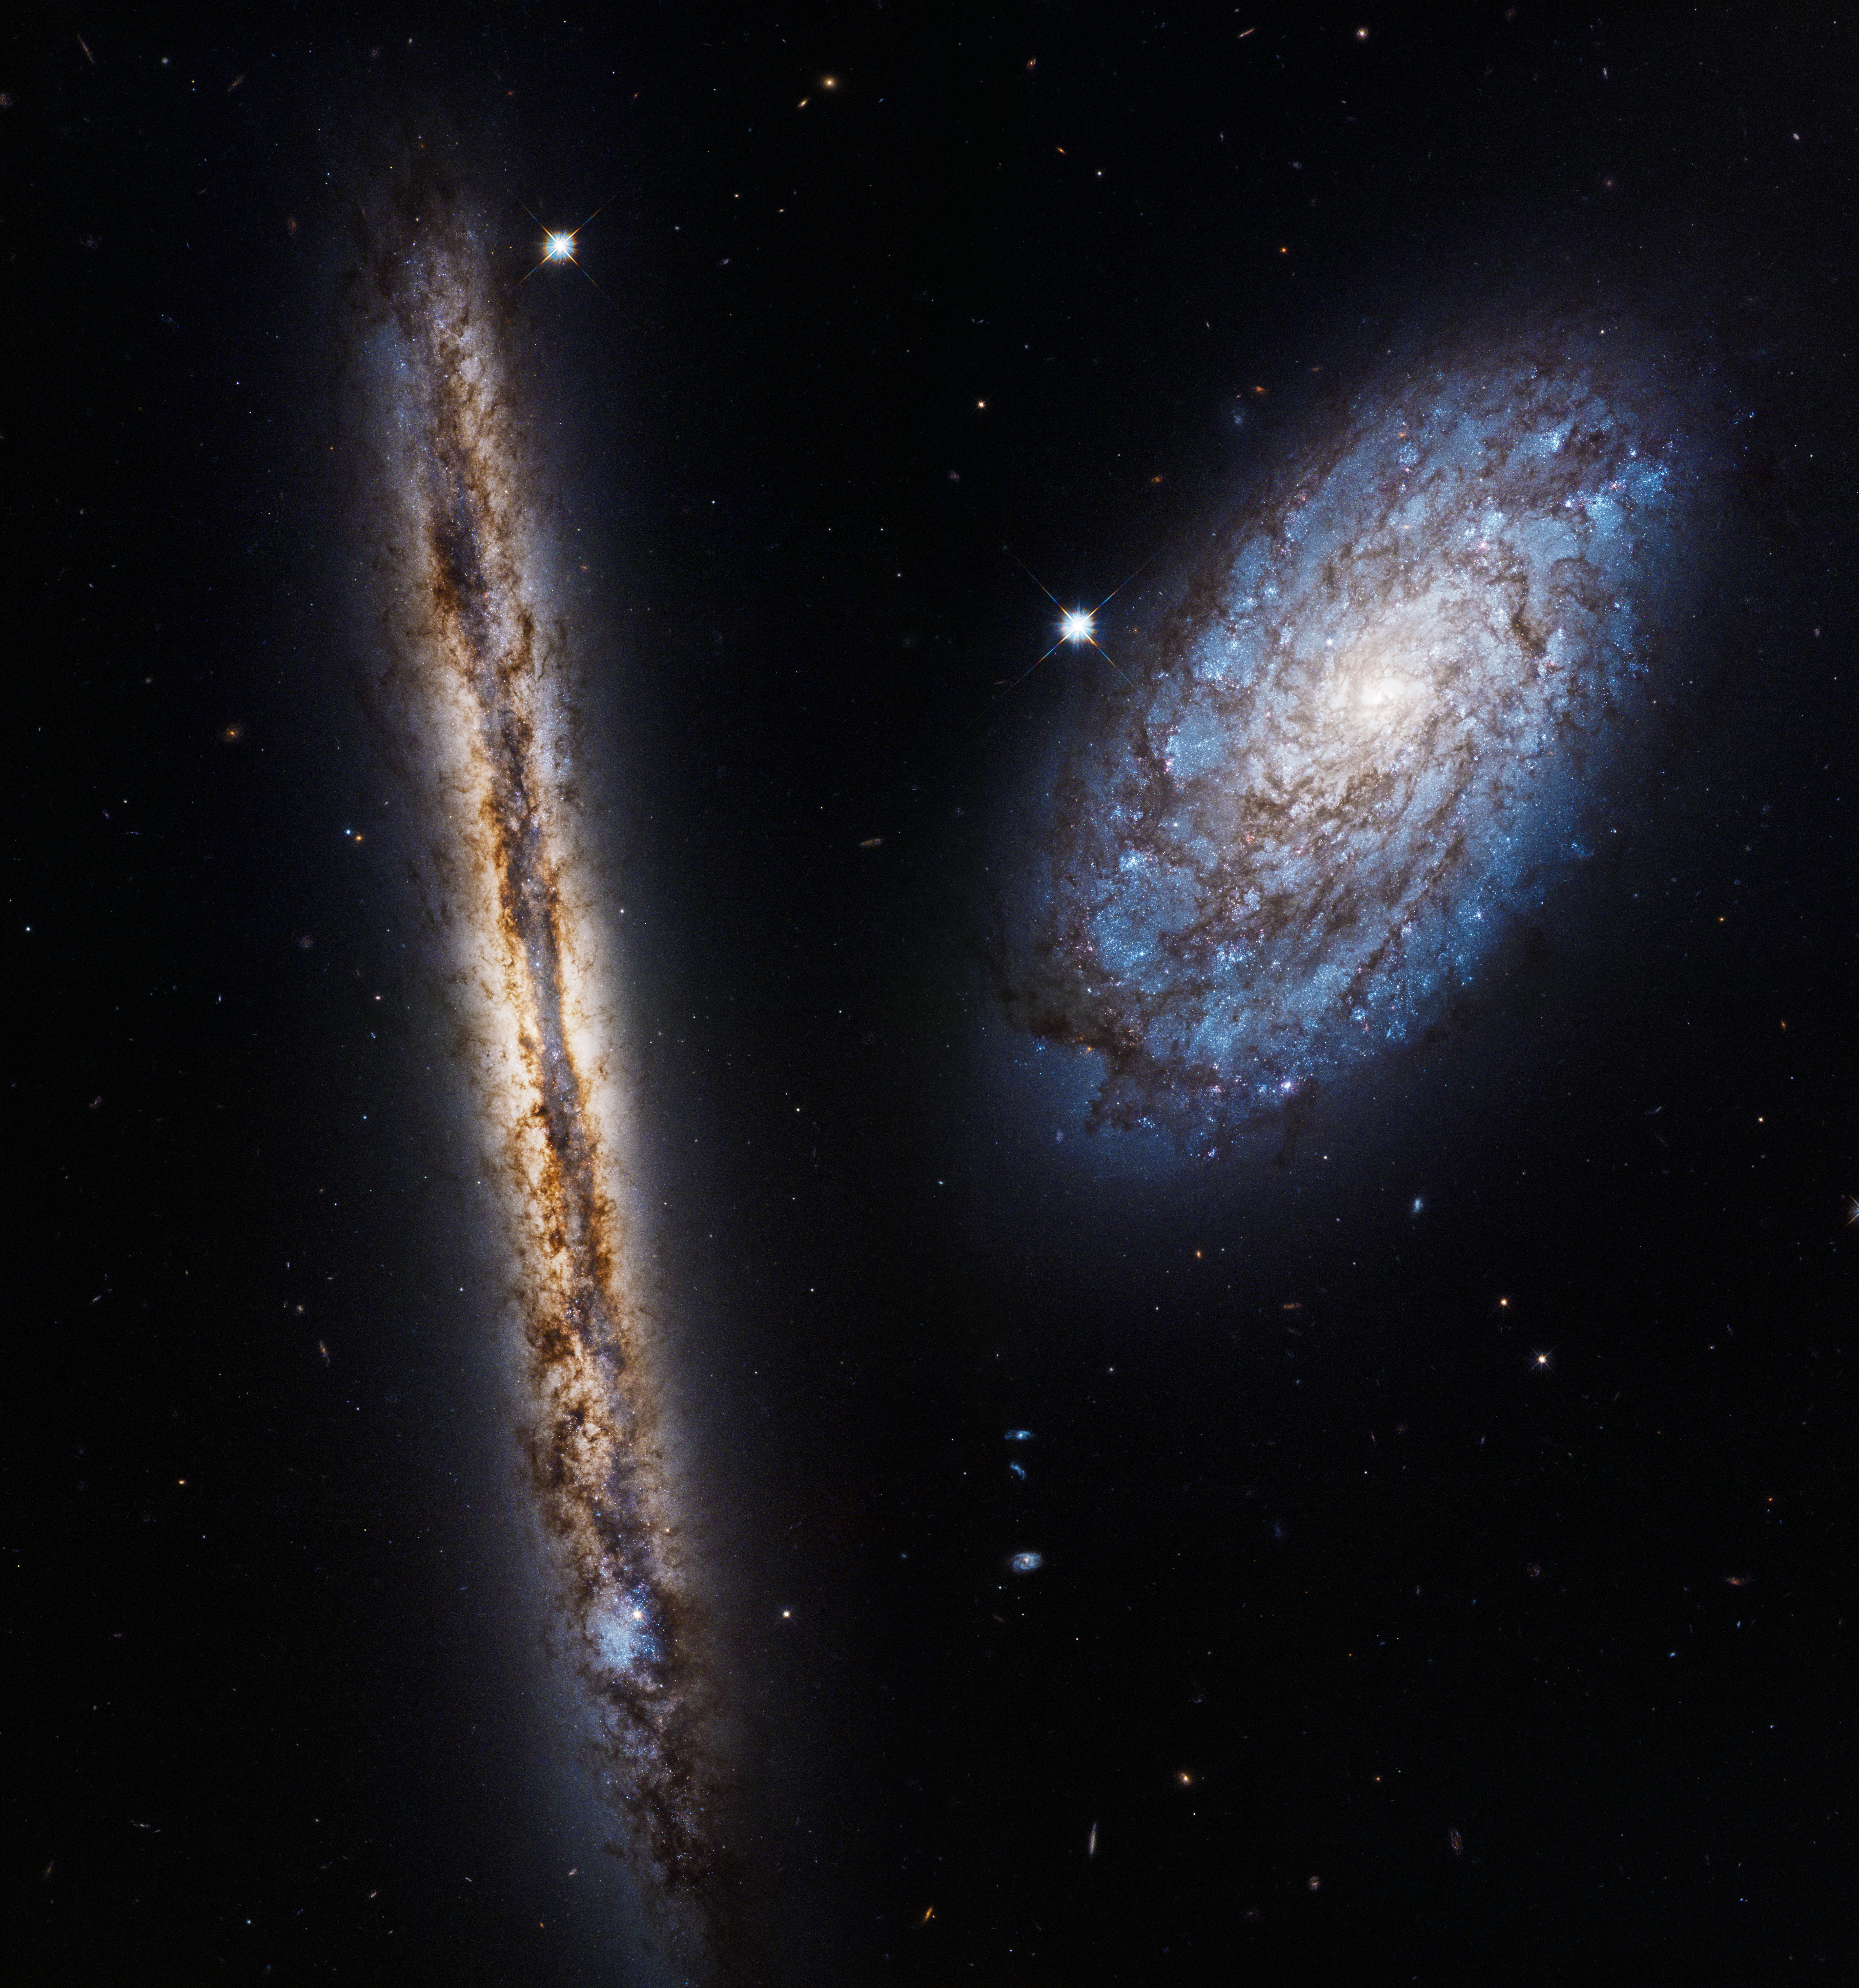

A close galactic pair

This image displays the galaxies NGC 4302 — seen edge-on — and NGC 4298, both located 55 million light-years away. They were observed by Hubble to celebrate its 27th year in orbit.

The galaxy NGC 4298 is seen almost face-on, allowing us to see its spiral arms and the blue patches of ongoing star formation and young stars. In the edge-on disc of NGC 4302 huge swathes of dust are responsible for the mottled brown patterns, but a burst of blue to the left side of the galaxy indicates a region of extremely vigorous star formation.

The image is a mosaic of four separate captures from Hubble, taken between 2 and 22 January 2017, that have been stitched together to give this amazing field of view. Two different types of light emitted by the galaxies — visible and near-infrared — have been combined to give a rich and colourful image. This light was captured by Hubble’s Wide Field Camera 3, one of the telescope’s most advanced imaging instruments.

Credit: NASA, ESA, and M. Mutchler (STScI)